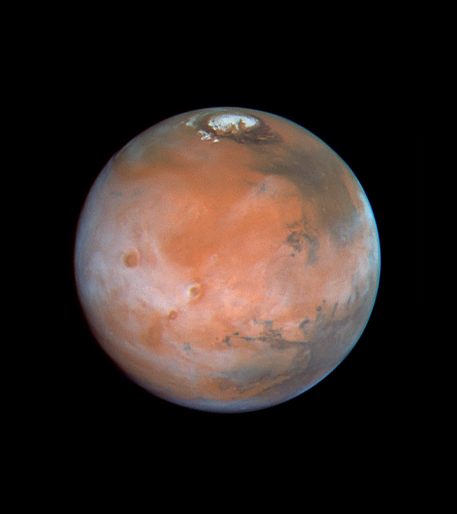

Four Views of Mars in Northern Summer

The Tharsis volcanos and associated clouds are prominent in the western half of this view. Olympus Mons, spanning 340 miles (550 km) across its base and reaching an elevation of 16 miles (25 km), extends through the cloud deck near the western limb, while (from the south) Arsia Mons, Pavonis Mons, and Ascraeus Mons are to the west of center.

Valles Marineris stretches to the east, and the Pathfinder landing site is shrouded in clouds near the afternoon limb.

Credit: Phil James (Univ. Toledo), Todd Clancy (Space Science Inst., Boulder, CO), Steve Lee (Univ. Colorado), and NASA/ESA